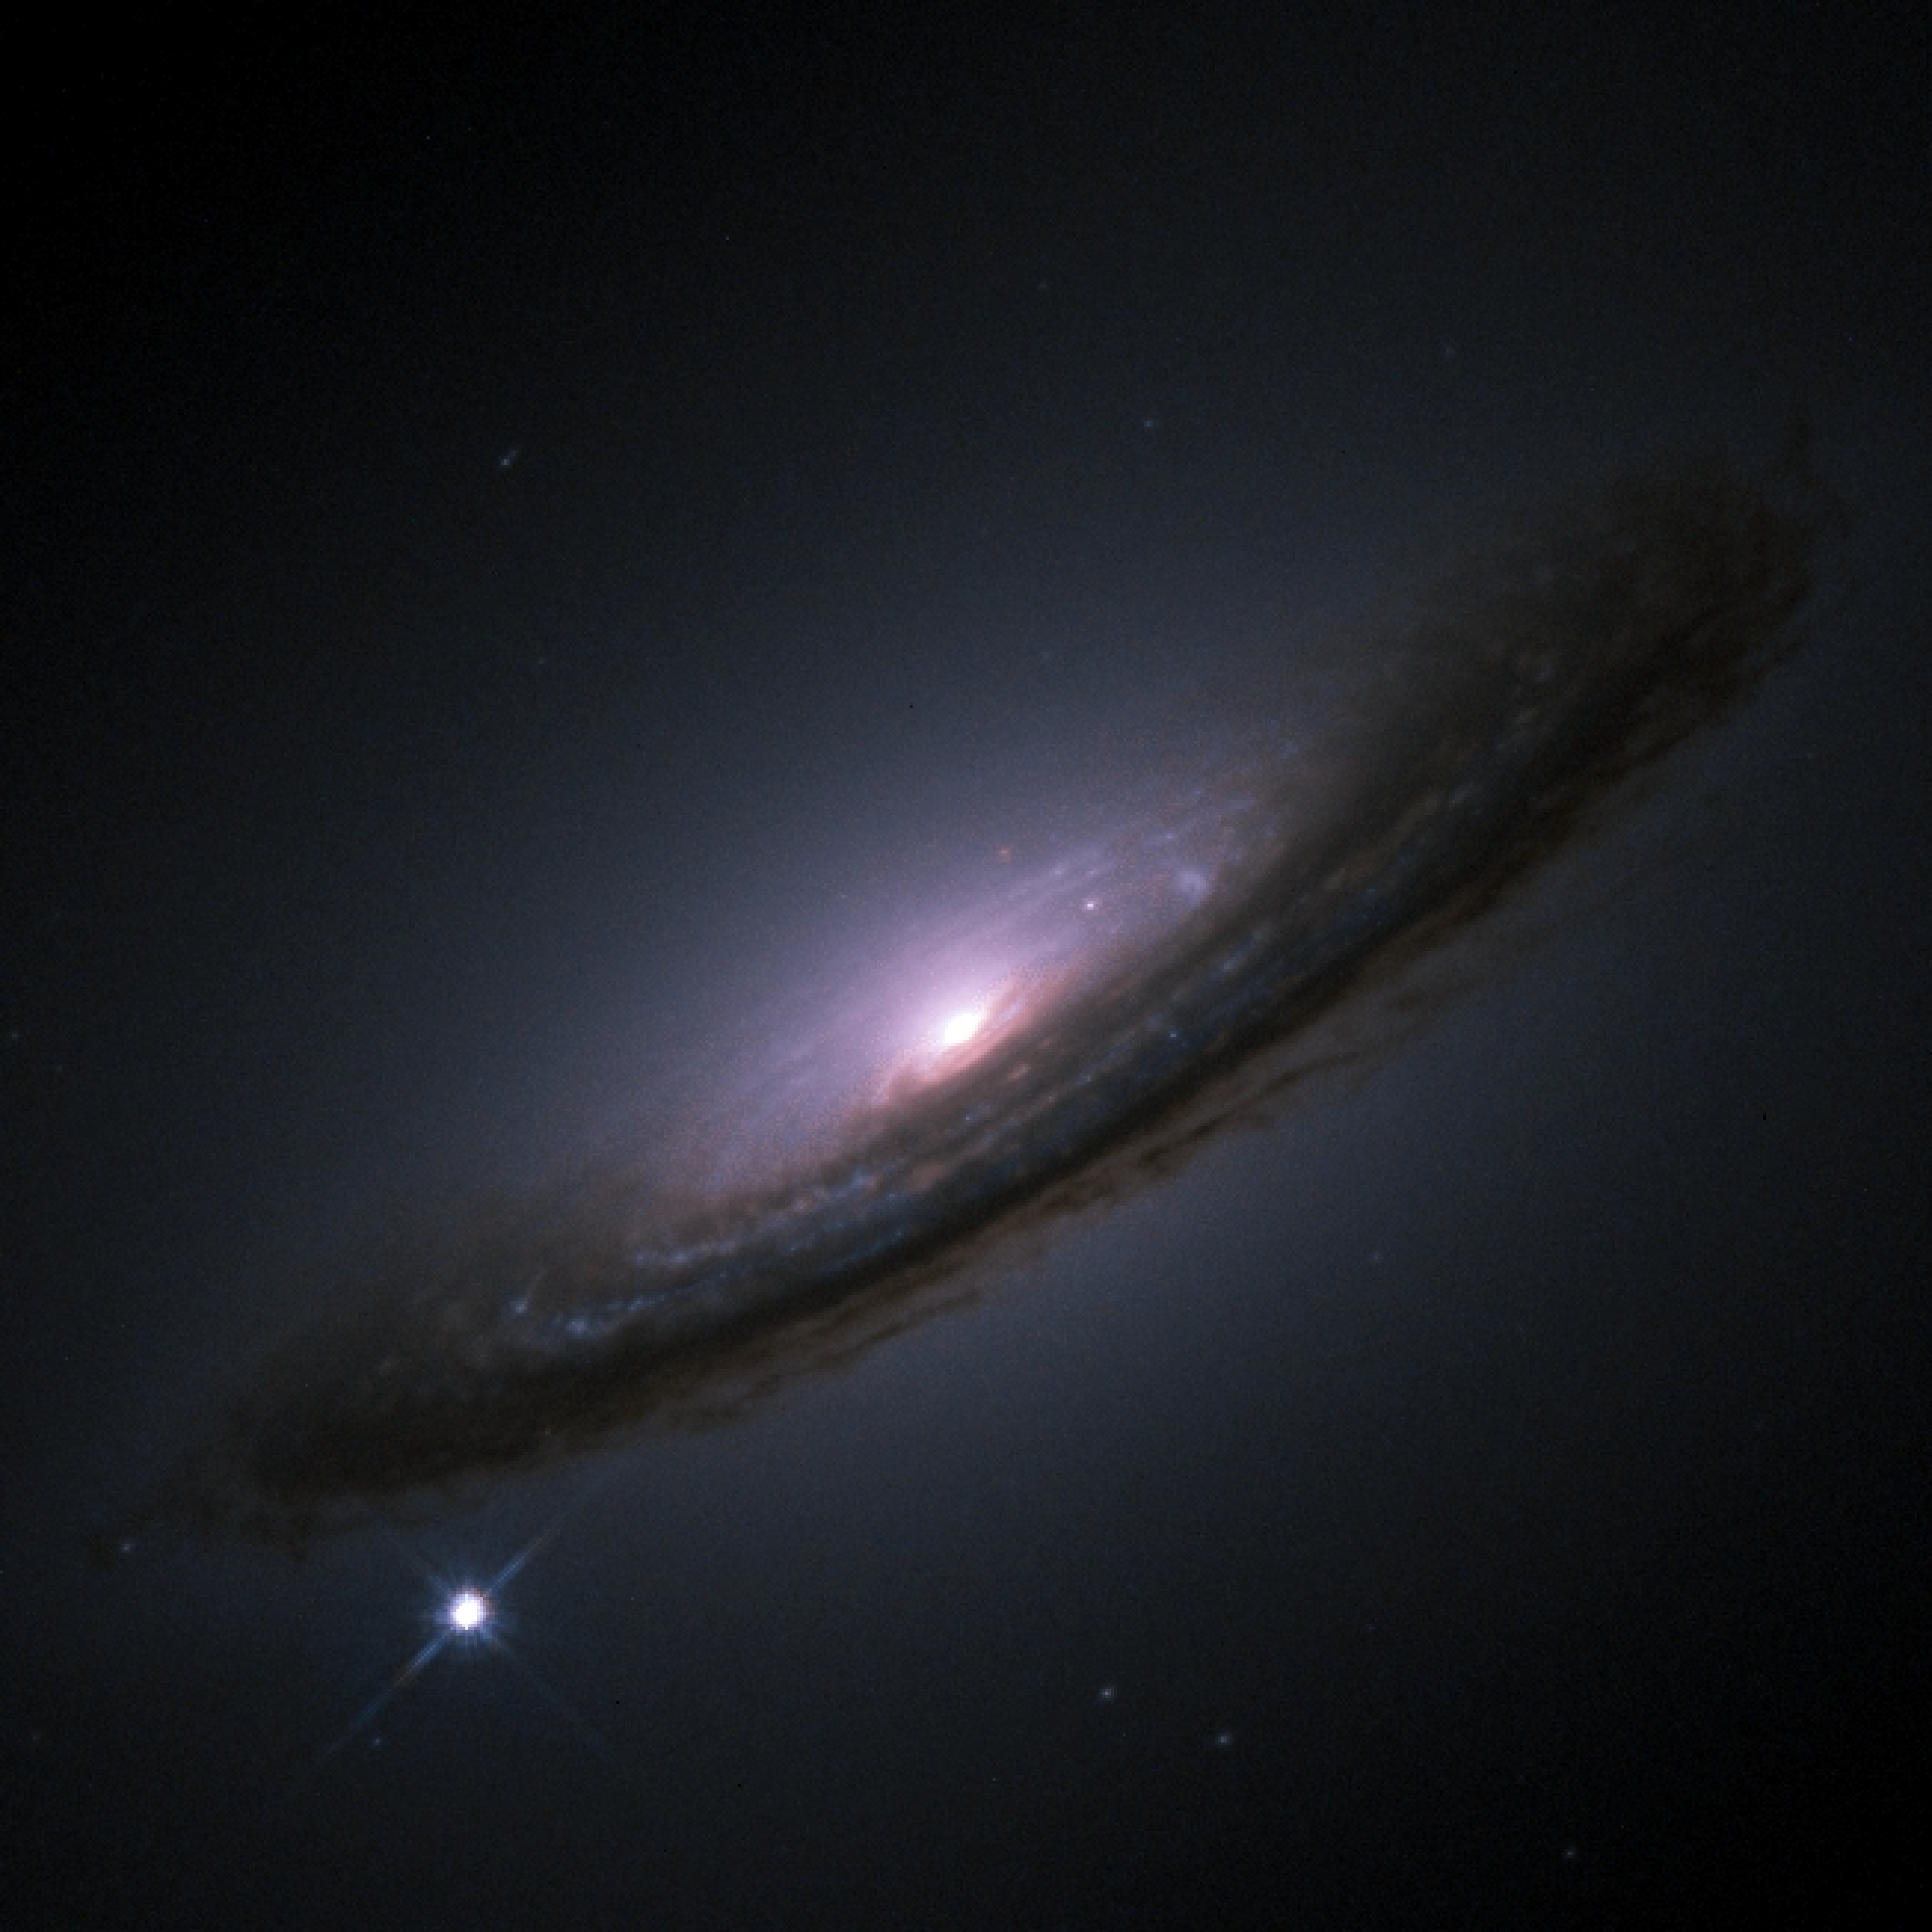

Supernova 1994D

Hubble Space Telescope image of supernova 1994D in galaxy NGC 4526.

Credit: NASA/ESA, The Hubble Key Project Team and The High-Z Supernova Search Team